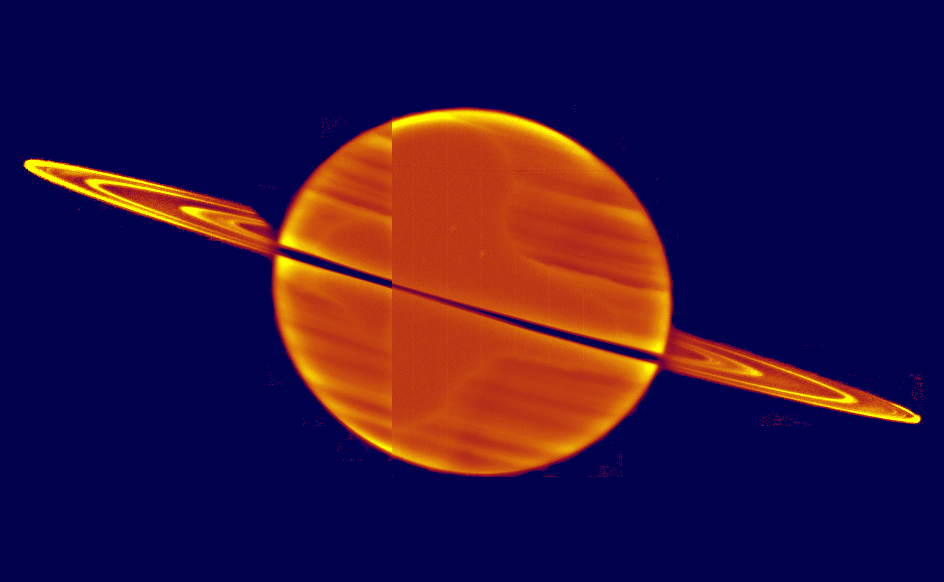

Sunset on Saturn's Rings

This is a rare view of Saturn's rings seen just after the Sun has set below the ring plane, taken with the Hubble Space Telescope on Nov. 21, 1995.

This perspective is unusual because the Earth is slightly above (2.7 degrees latitude) Saturn's rings and the Sun is below them. Normally we see the rings fully illuminated by the Sun.

Credit: Phil Nicholson (Cornell University), Steve Larson (University of Arizona) and NASA/ESA